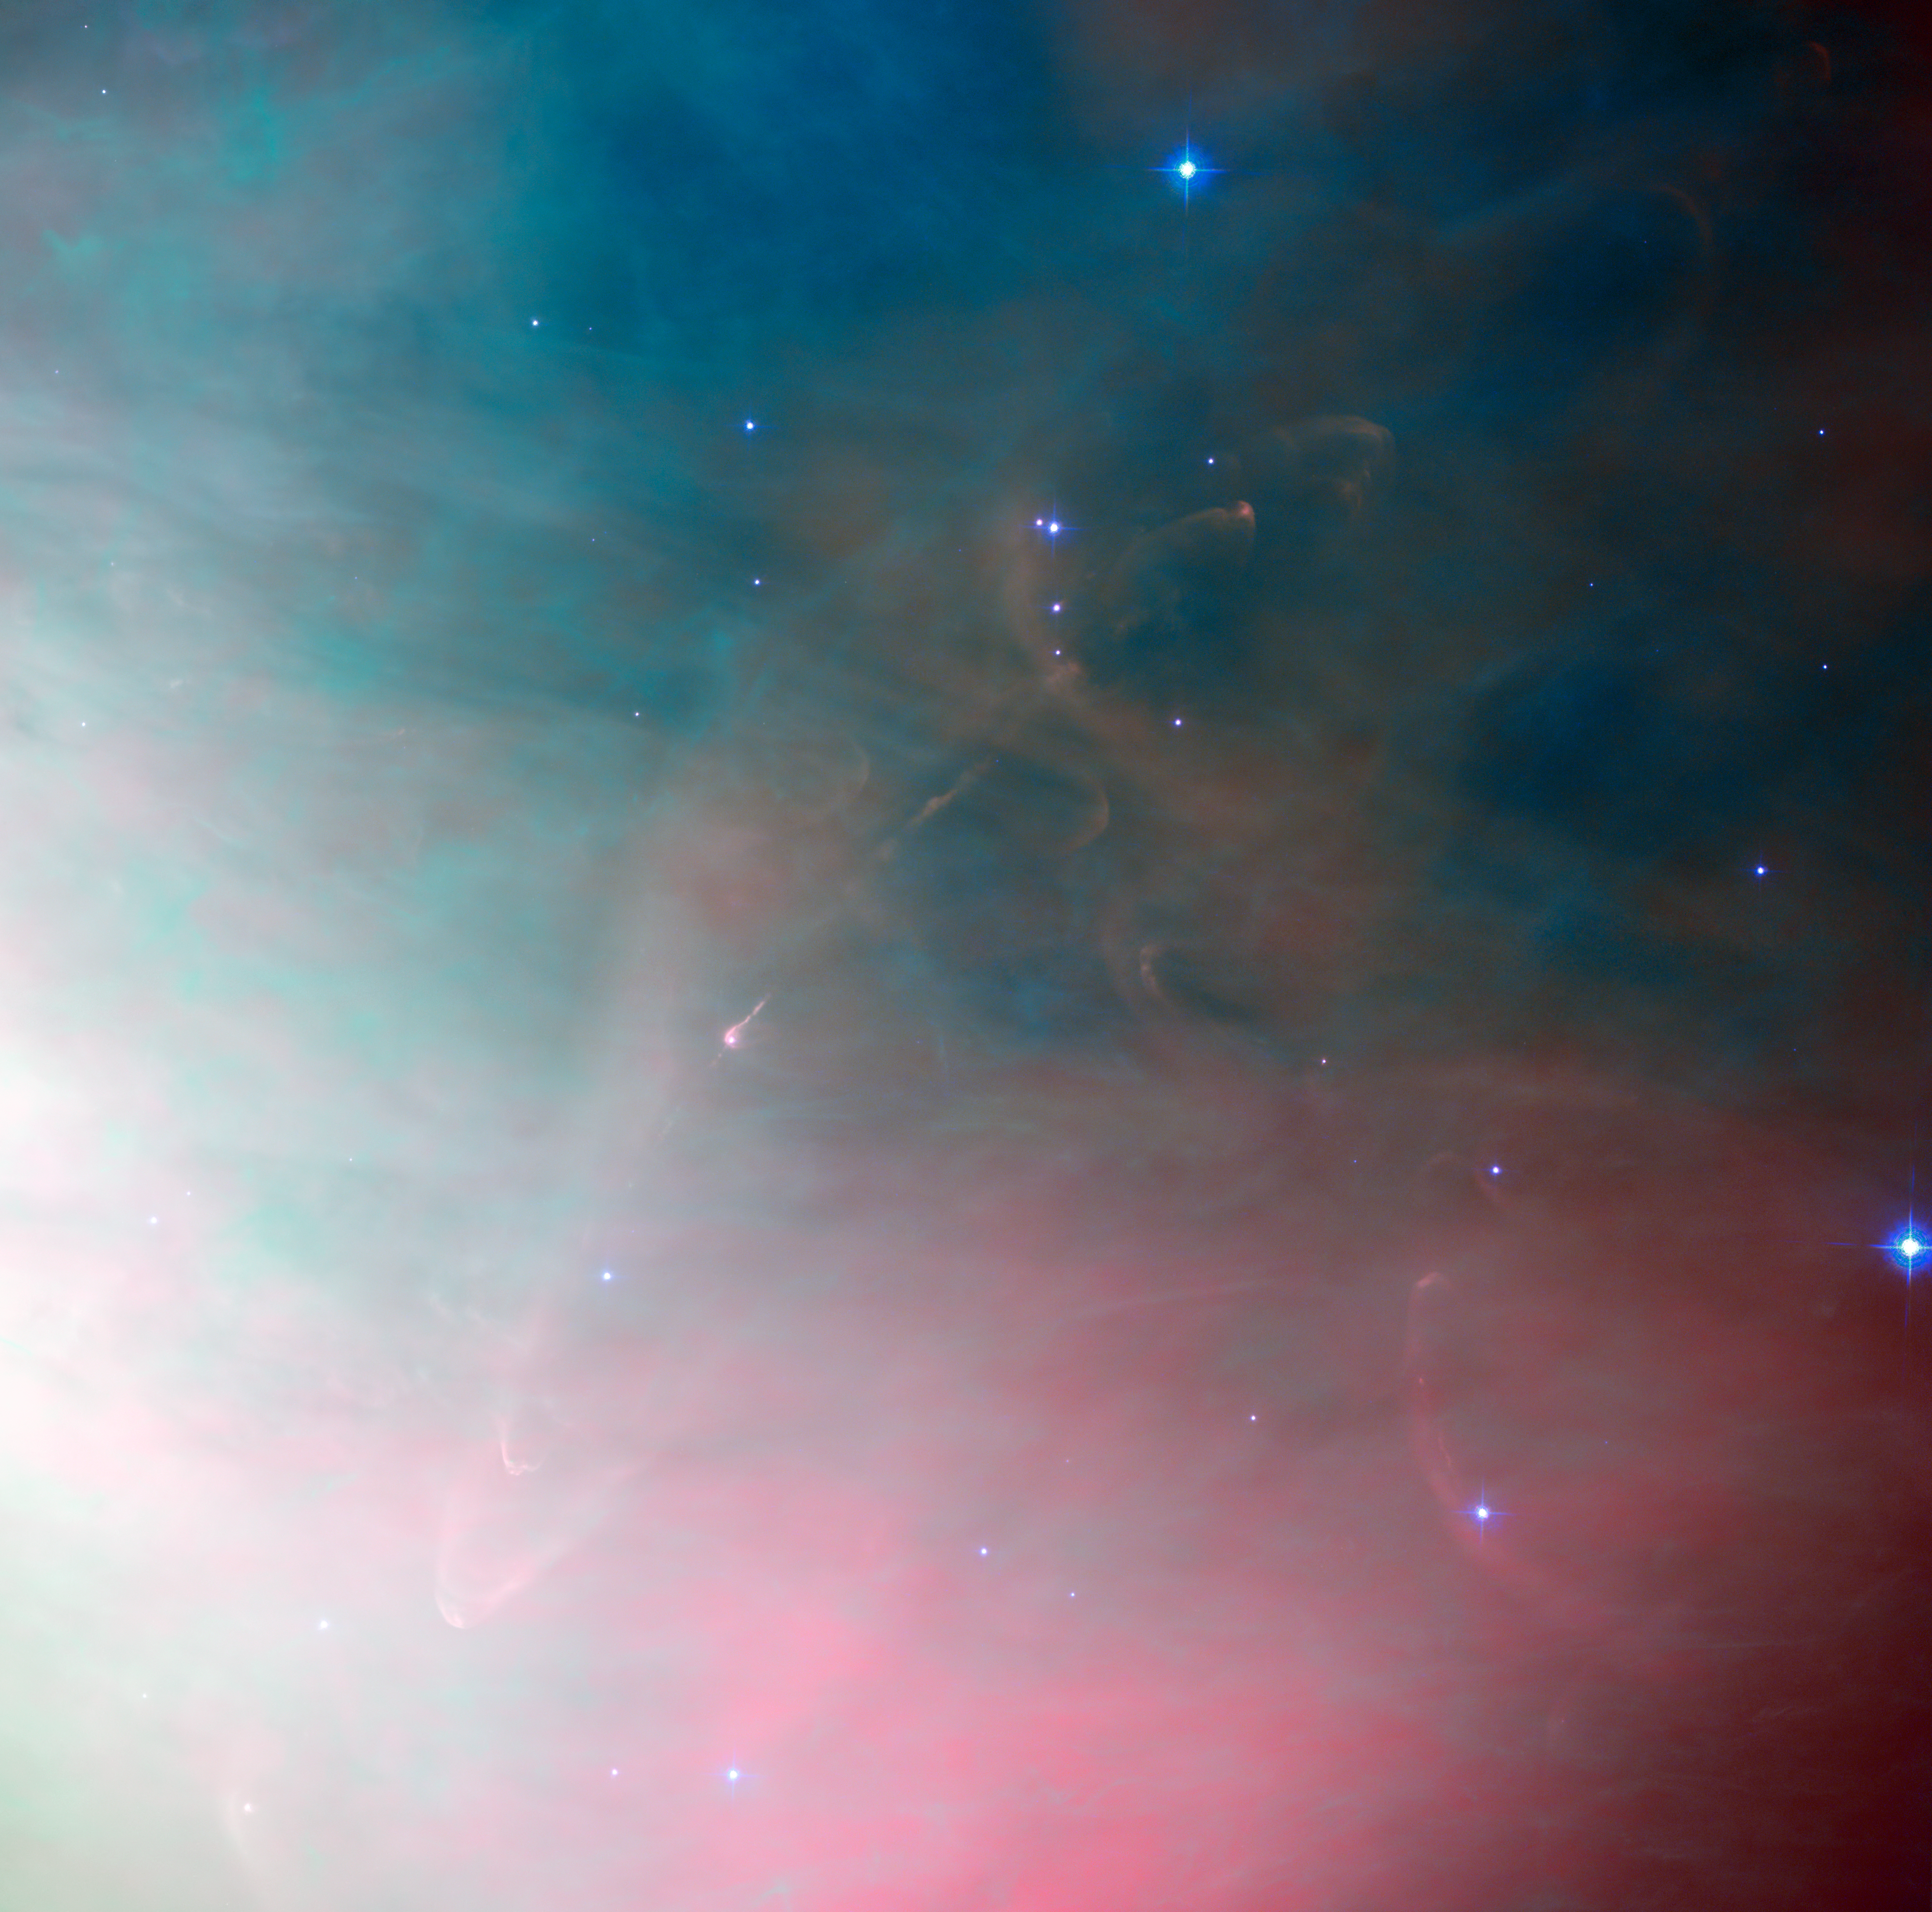

Star formation fireworks in Orion

The keen eye of the NASA/ESA Hubble Space Telescope has often peered deeply into the Orion Nebula to see the processes occurring there and revealed many dramatic tableaux of young stars hurling material into space and entire solar systems forming. This image shows the spectacular region around an object known as Herbig-Haro 502, a very small part of the vast stellar nursery.

The entire picture is filled with the rich colourful glow of the nebula and, just left of the centre, a star embedded in a pinkish glow can be also seen. This fascinating object is an example of a very young star surrounded by the cloud of gas from which it formed. This leftover material may accrete to form planets and eventually solar systems as intricate as our own. It is highly likely that the material that now forms our own planet Earth was part of a similar gaseous cocoon about five billion years ago. Such is the importance of these objects that much Hubble observing time has been dedicated to studying them.

In this image Herbig-Haro 502 shows up as a narrow pink jet extending away from the young star as well as curved bow shock features to the upper-right and lower-left. Herbig-Haro objects are striking areas of nebulosity near to recently formed stars. They are created when the very young stars eject gas at breakneck speeds of hundreds of kilometres per second, which impacts the surrounding gas and dust. These ephemeral shockwaves are thought to dissipate after a few thousand years; the blink of an eye in astronomical terms. They vary in size but are often much larger than our own Solar System.

At only around 1500 light-years distant, the Orion Nebula it is one of the closest areas of star formation to us. Understanding how stars form and evolve is an important area of astronomy, and one to which Hubble has greatly contributed. Images such as this are not only beautiful from an artistic perspective, but also help us understand more about how the Universe developed, and is continuing to change.

This image was taken with the Wide Field Channel of the Advanced Camera for Surveys on Hubble. This picture was created from images taken through filters that isolate the light from glowing hydrogen (F658N, coloured red), ionised oxygen (F502N, coloured green) and yellow light (F550W, coloured blue). The exposures times were 1000 s, 2000 s and 1000 s respectively. The field of view is about 3.3 arcminutes across.

Credit: ESA/Hubble & NASA